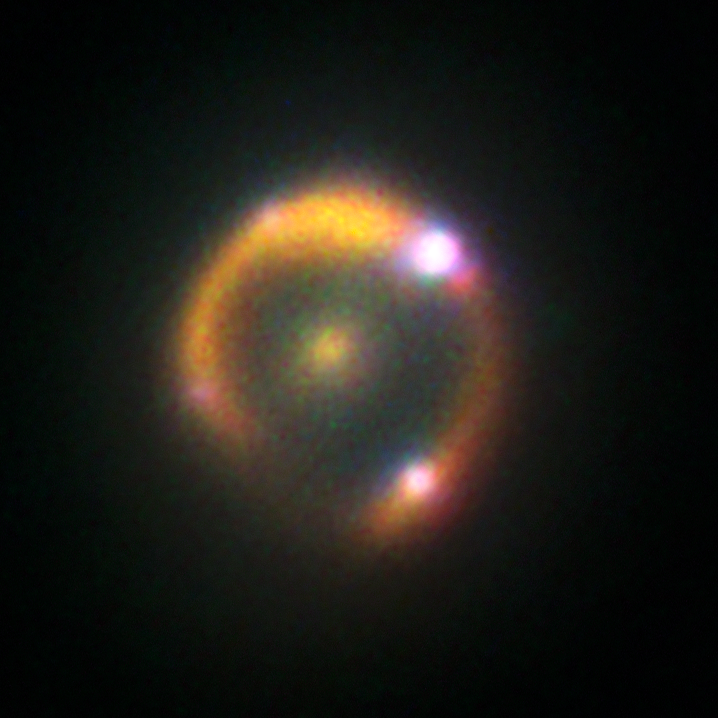

Keck’s view on lensed supernova

The adaptive-optics instruments on the W.M. Keck Observatory on Mauna Kea, Hawaii, were able to resolve the supernova explosion iPTF16geu in detail.

Credit: ESA/Hubble, W. M. Keck Observatory